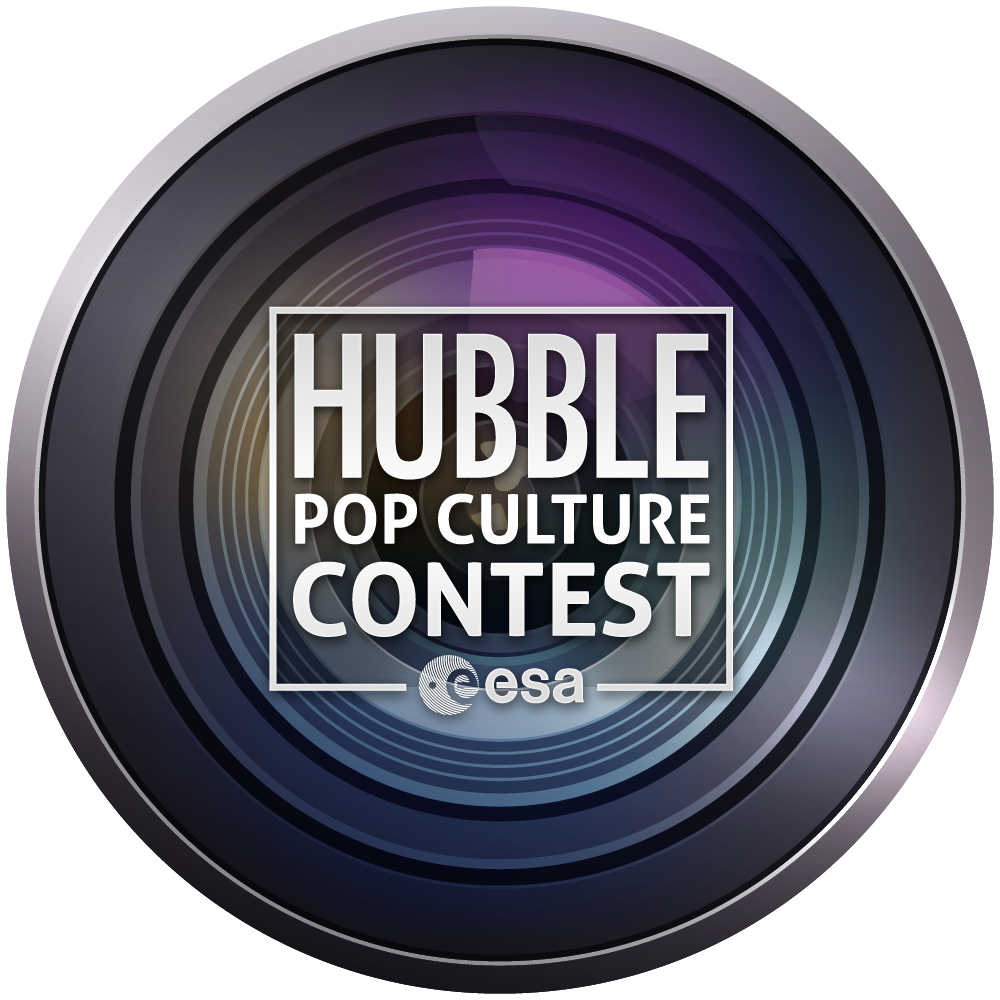

Join in the Hubble pop culture contest!

In honour of the NASA/ESA Hubble Space Telescope’s 20th anniversary, the European Space Agency (ESA) is proud to present the ESA “Hubble Pop Culture” competition — a free competition that calls for everyone who loves Hubble to find examples of it in popular culture. Have you seen a Hubble image on the cover of a CD? Has Hubble been used as inspiration for art? Let us know and you could win great prizes!

When you find an interesting example of Hubble within popular culture, take a picture, write a quick caption and submit it to us. We are looking for examples that fit in the following five categories:

1. Most Artistic

2. Weirdest

3. Funniest

4. Largest

5. Smallest

Complete rules and regulations can be found here: http://www.spacetelescope.org/hubblepopculture

The entries should be submitted on or before 31 July 2010.

Credit: NASA & ESA